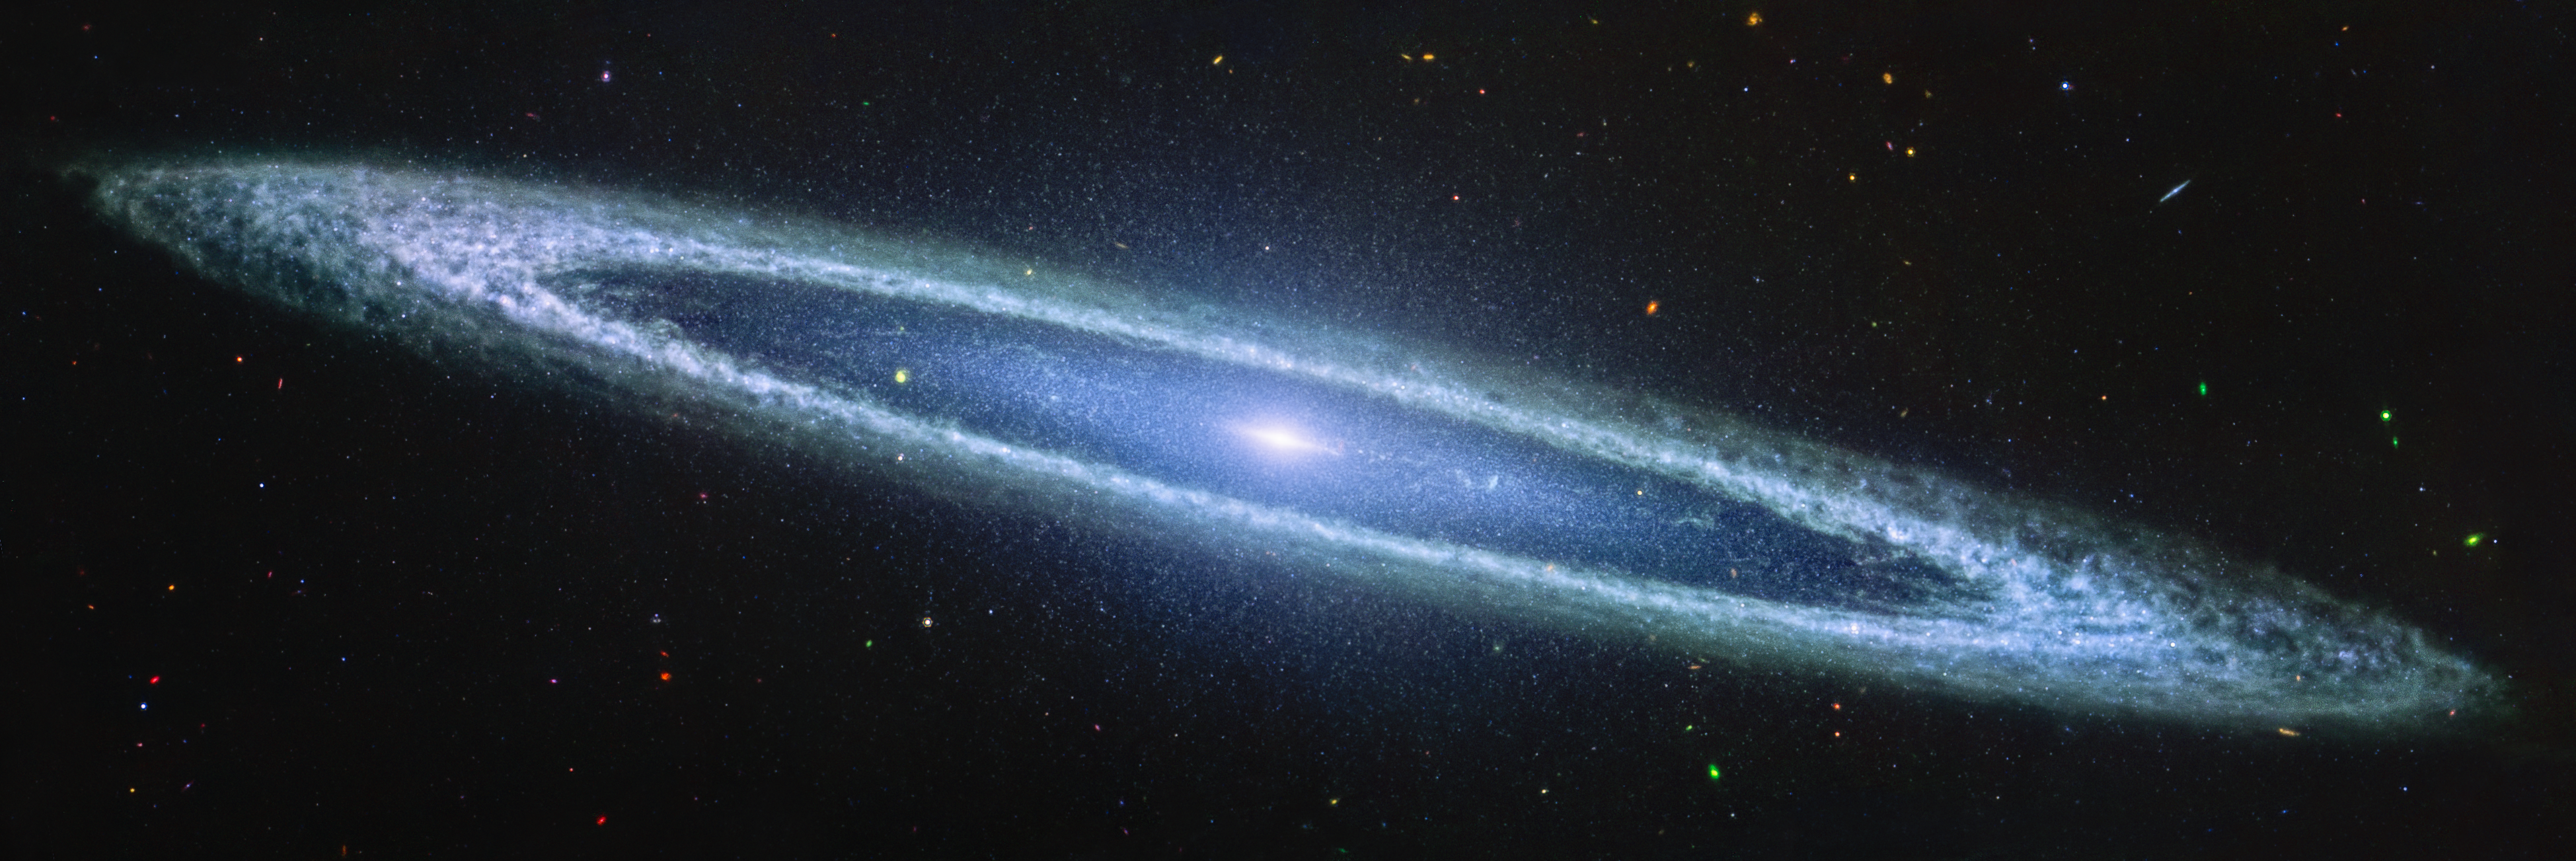

Sombrero galaxy (MIRI)

The NASA/ESA/CSA James Webb Space Telescope recently imaged the Sombrero galaxy with its MIRI (Mid-Infrared Instrument), resolving the clumpy nature of the dust along the galaxy’s outer ring.

The mid-infrared light highlights the gas and dust that are part of star formation taking place among the Sombrero galaxy’s outer disk. The rings of the Sombrero galaxy produce less than one solar mass of stars per year, in comparison to the Milky Way’s roughly two solar masses a year. It’s not a particular hotbed of star formation.

The Sombrero galaxy is around 30 million light-years from Earth in the constellation Virgo.

Credit: NASA, ESA, CSA, STScI